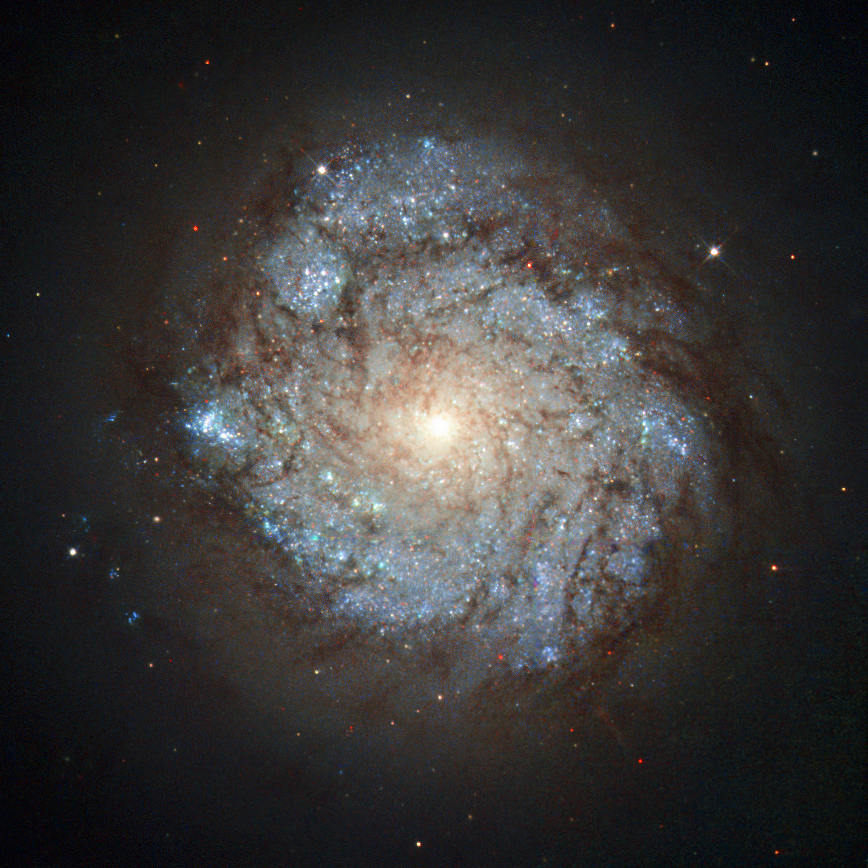

Cassiopeia’s unusual resident

This image, taken by the NASA/ESA Hubble Space Telescope’s Wide Field Planetary Camera 2, shows a spiral galaxy named NGC 278. This cosmic beauty lies some 38 million light-years away in the northern constellation of Cassiopeia (The Seated Queen).

While NGC 278 may look serene, it is anything but. The galaxy is currently undergoing an immense burst of star formation. This flurry of activity is shown by the unmistakable blue-hued knots speckling the galaxy’s spiral arms, each of which marks a clump of hot newborn stars.

However, NGC 278’s star formation is somewhat unusual; it does not extend to the galaxy’s outer edges, but is only taking place within an inner ring some 6500 light-years across. This two-tiered structure is visible in this image — while the galaxy’s centre is bright, its extremities are much darker. This odd configuration is thought to have been caused by a merger with a smaller, gas-rich galaxy — while the turbulent event ignited the centre of NGC 278, the dusty remains of the small snack then dispersed into the galaxy’s outer regions. Whatever the cause, such a ring of star formation, called a nuclear ring, is extremely unusual in galaxies without a bar at their centre, making NGC 278 a very intriguing sight.

Credit: ESA/Hubble & NASA and S. Smartt (Queen's University Belfast)